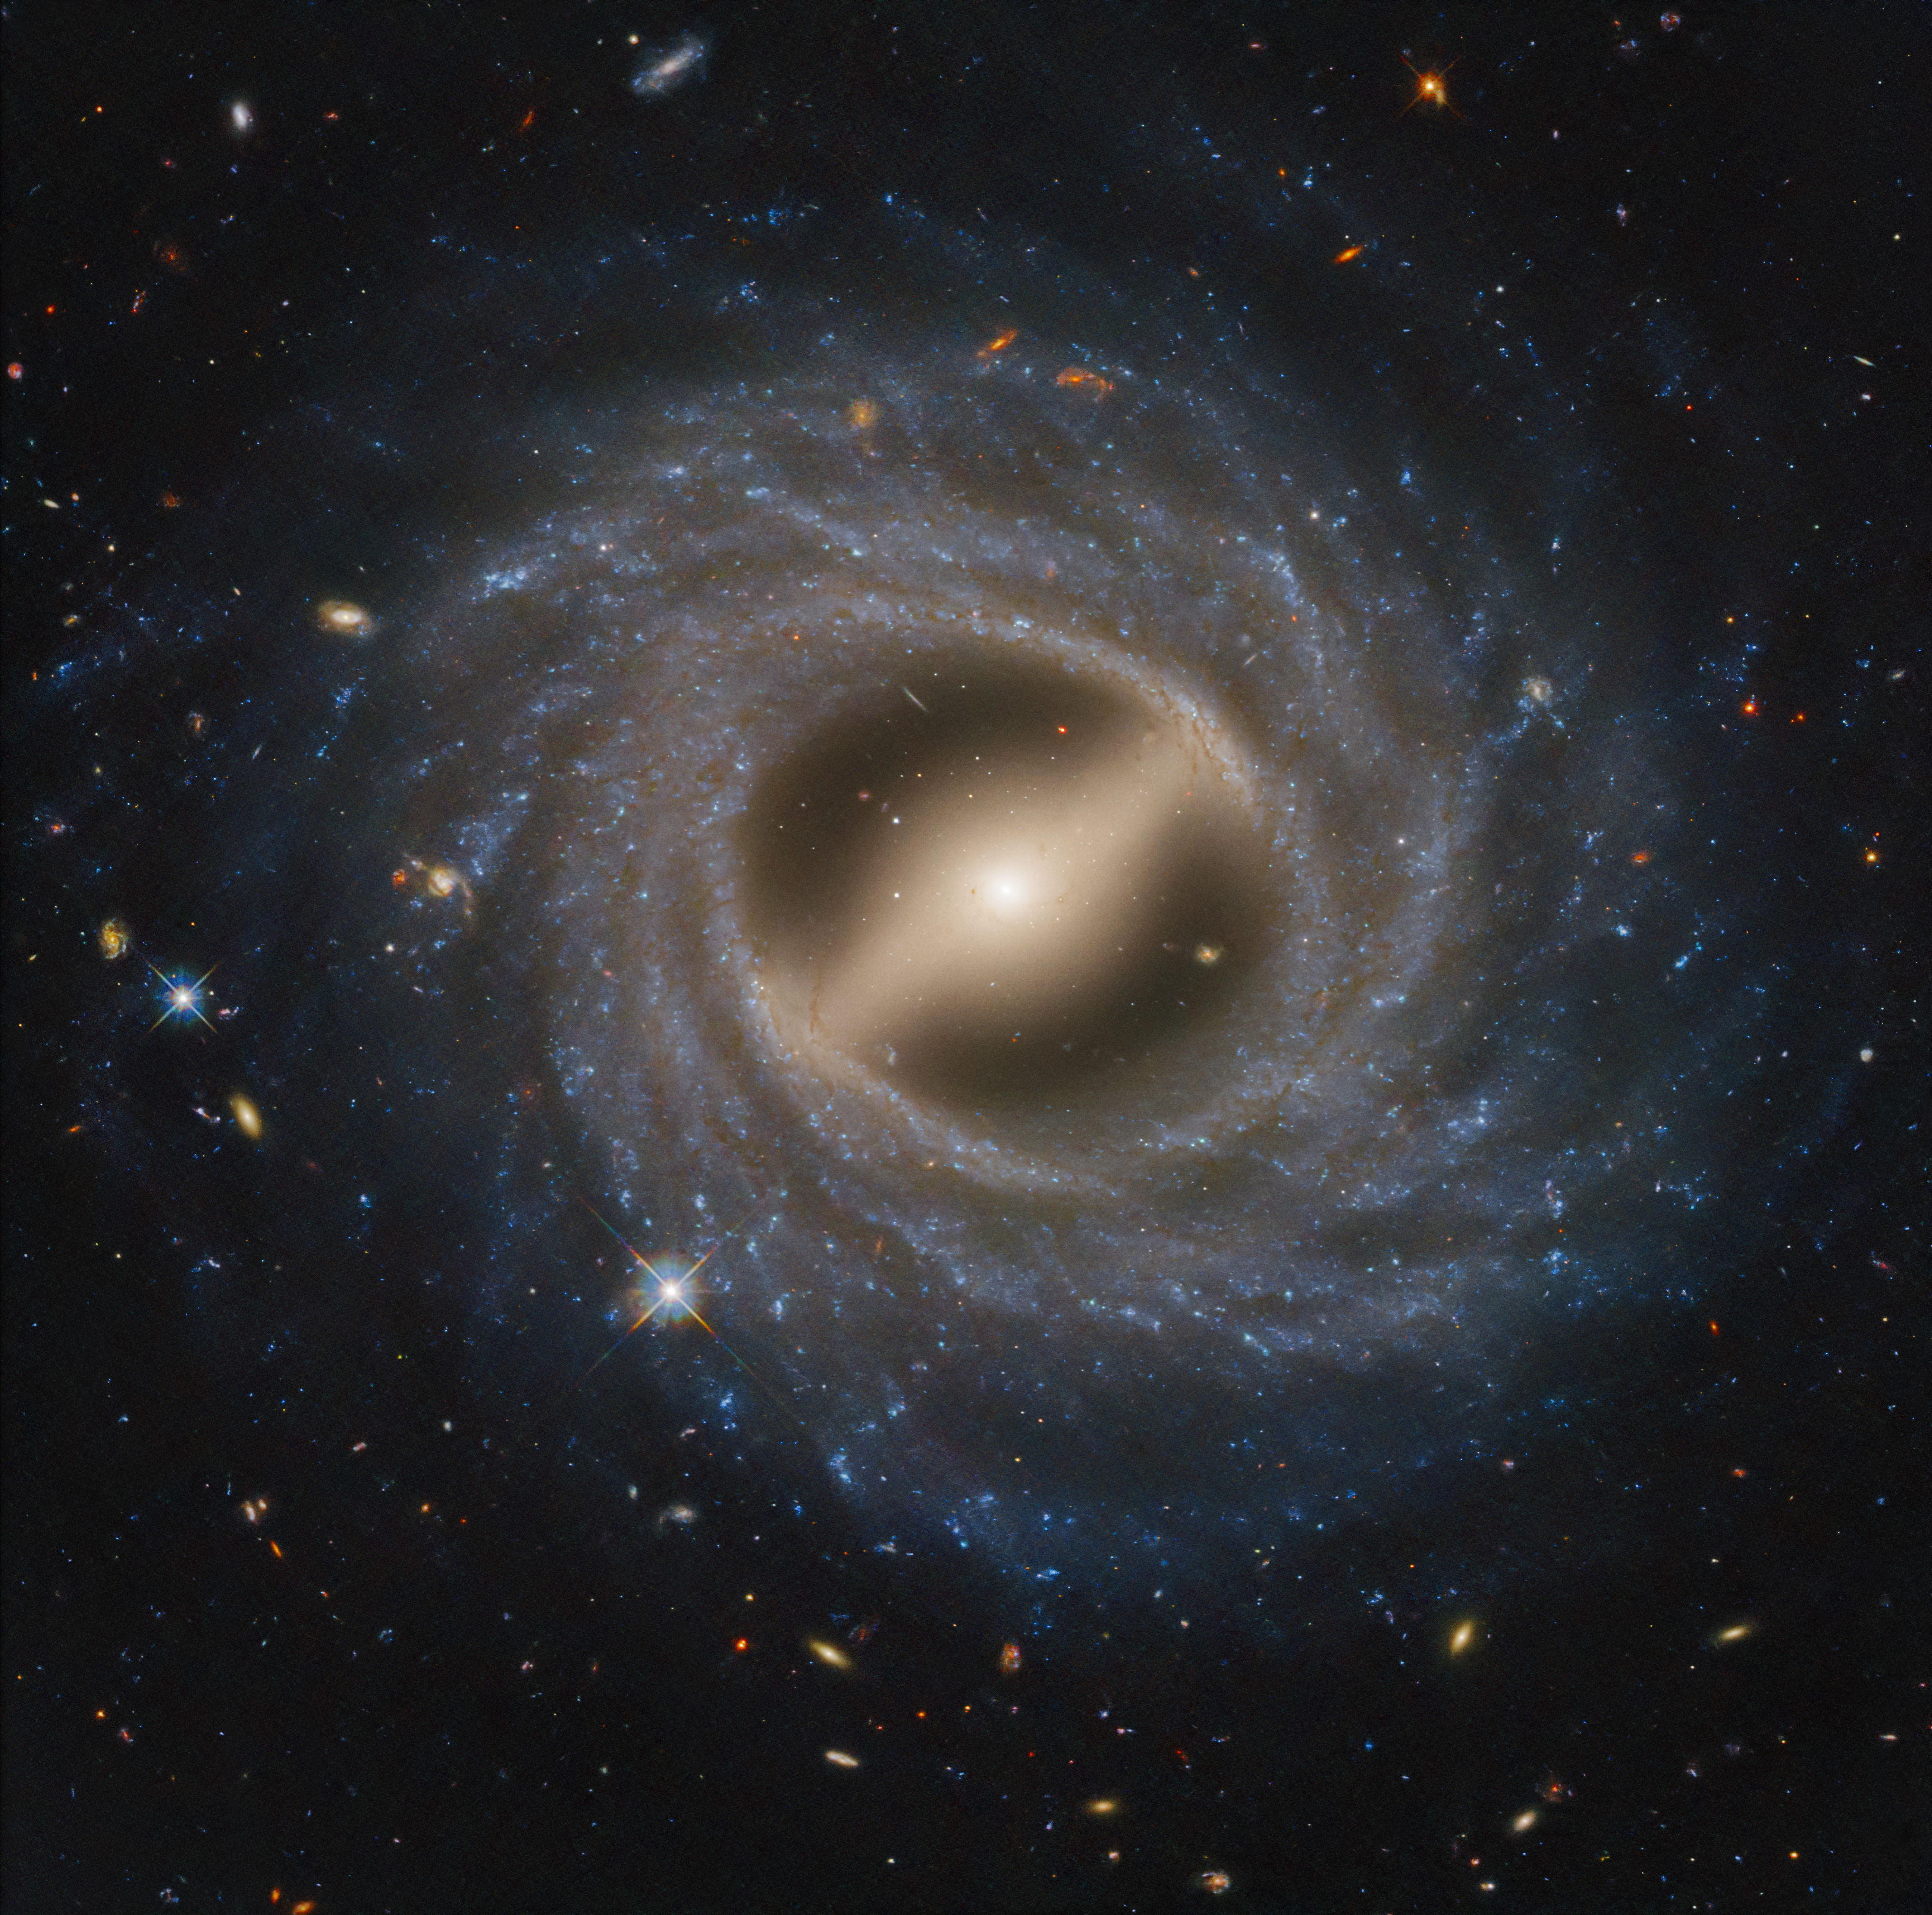

Barred Spiral Galaxy NGC 5335

The Hubble Space Telescope captured in exquisite detail a face-on view of a remarkable-looking galaxy. NGC 5335 is categorized as a flocculent spiral galaxy with patchy streamers of star formation across its disk. There is a striking lack of well-defined spiral arms that are commonly found among galaxies, including our Milky Way. A notable bar structure slices across the center of the galaxy. The bar channels gas inwards toward the galactic center, fueling star formation. Such bars are dynamic in galaxies and may come and go over two-billion-year intervals. They appear in about 30 percent of observed galaxies, including our Milky Way.

Credit: NASA, ESA, STScI